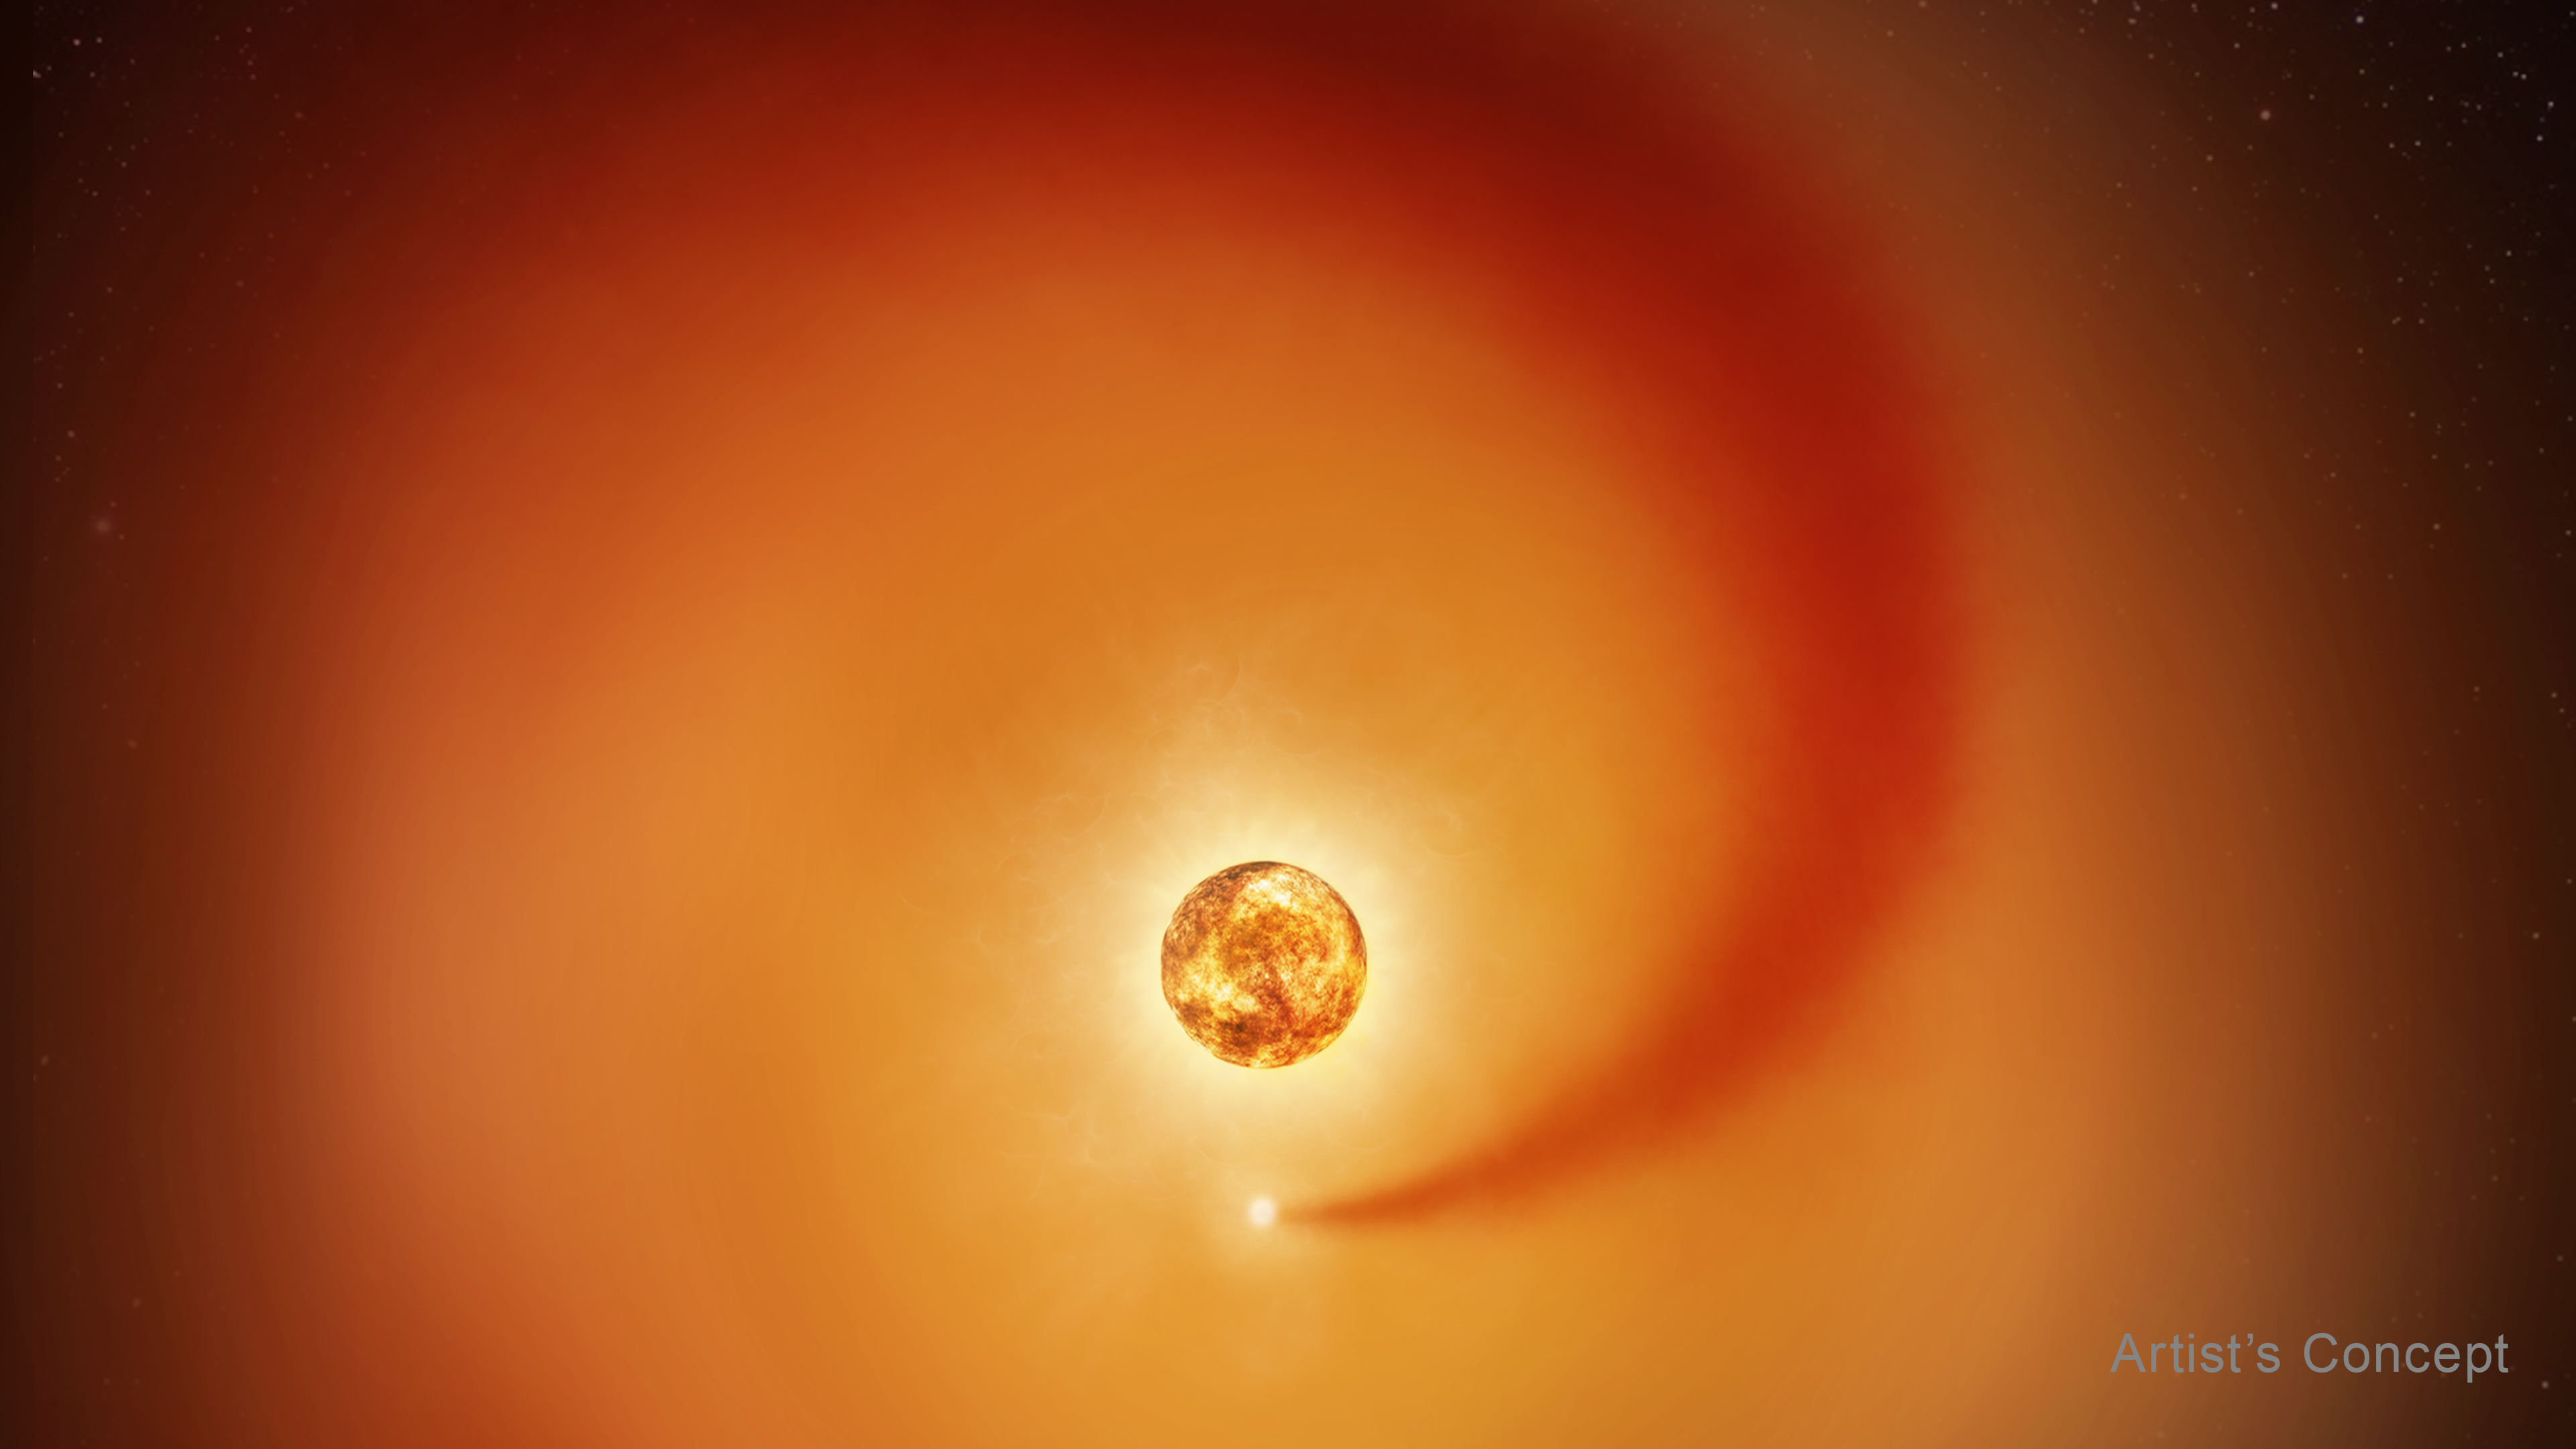

Betelgeuse and wake of its companion star (artist's concept)

Using new observations from the NASA/ESA Hubble Space Telescope and ground-based observatories, astronomers tracked the influence of a recently discovered companion star, Siwarha, on the gas around Betelgeuse. The research reveals a trail of dense gas swirling through Betelgeuse’s vast, extended atmosphere, shedding light on why the giant star’s brightness and atmosphere have changed in strange and unusual ways.

This artist’s concept shows the red supergiant star Betelgeuse and an orbiting companion star. The companion, which is orbiting clockwise from this point of view, generates a dense wake of gas that expands outward. It is so close to Betelgeuse that it is passing through the extended outer atmosphere of the supergiant. The companion star is not to scale; it would be a pinprick compared to Betelgeuse, which is hundreds of times larger. The companion’s distance from Betelgeuse is to scale relative to the diameter of Betelgeuse.

The results of the new study were presented at the 247th meeting of the American Astronomical Society and are accepted for publication in The Astrophysical Journal. More details about this new result can be read here.

Credit: NASA, ESA, E. Wheatley (STScI), Science: A. Dupree (CfA)